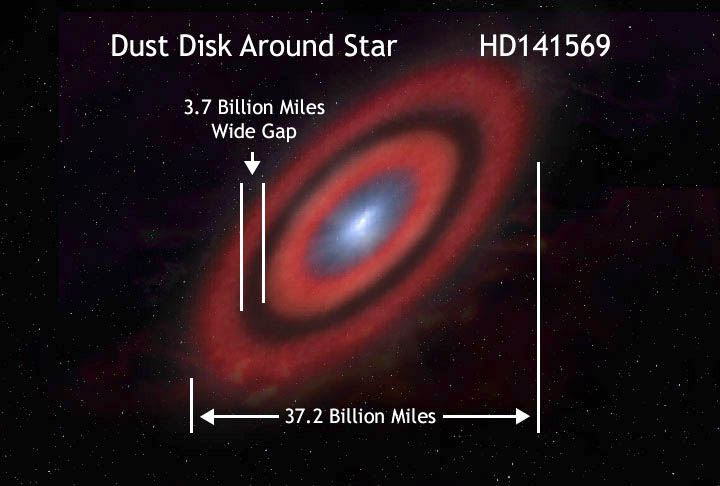

Orbit of HD141569

An artist's concept of the star HD141569 and its surrounding ring, illustrating the size of the ring system.

Credit: Greg Bacon, Space Telescope Science Institute